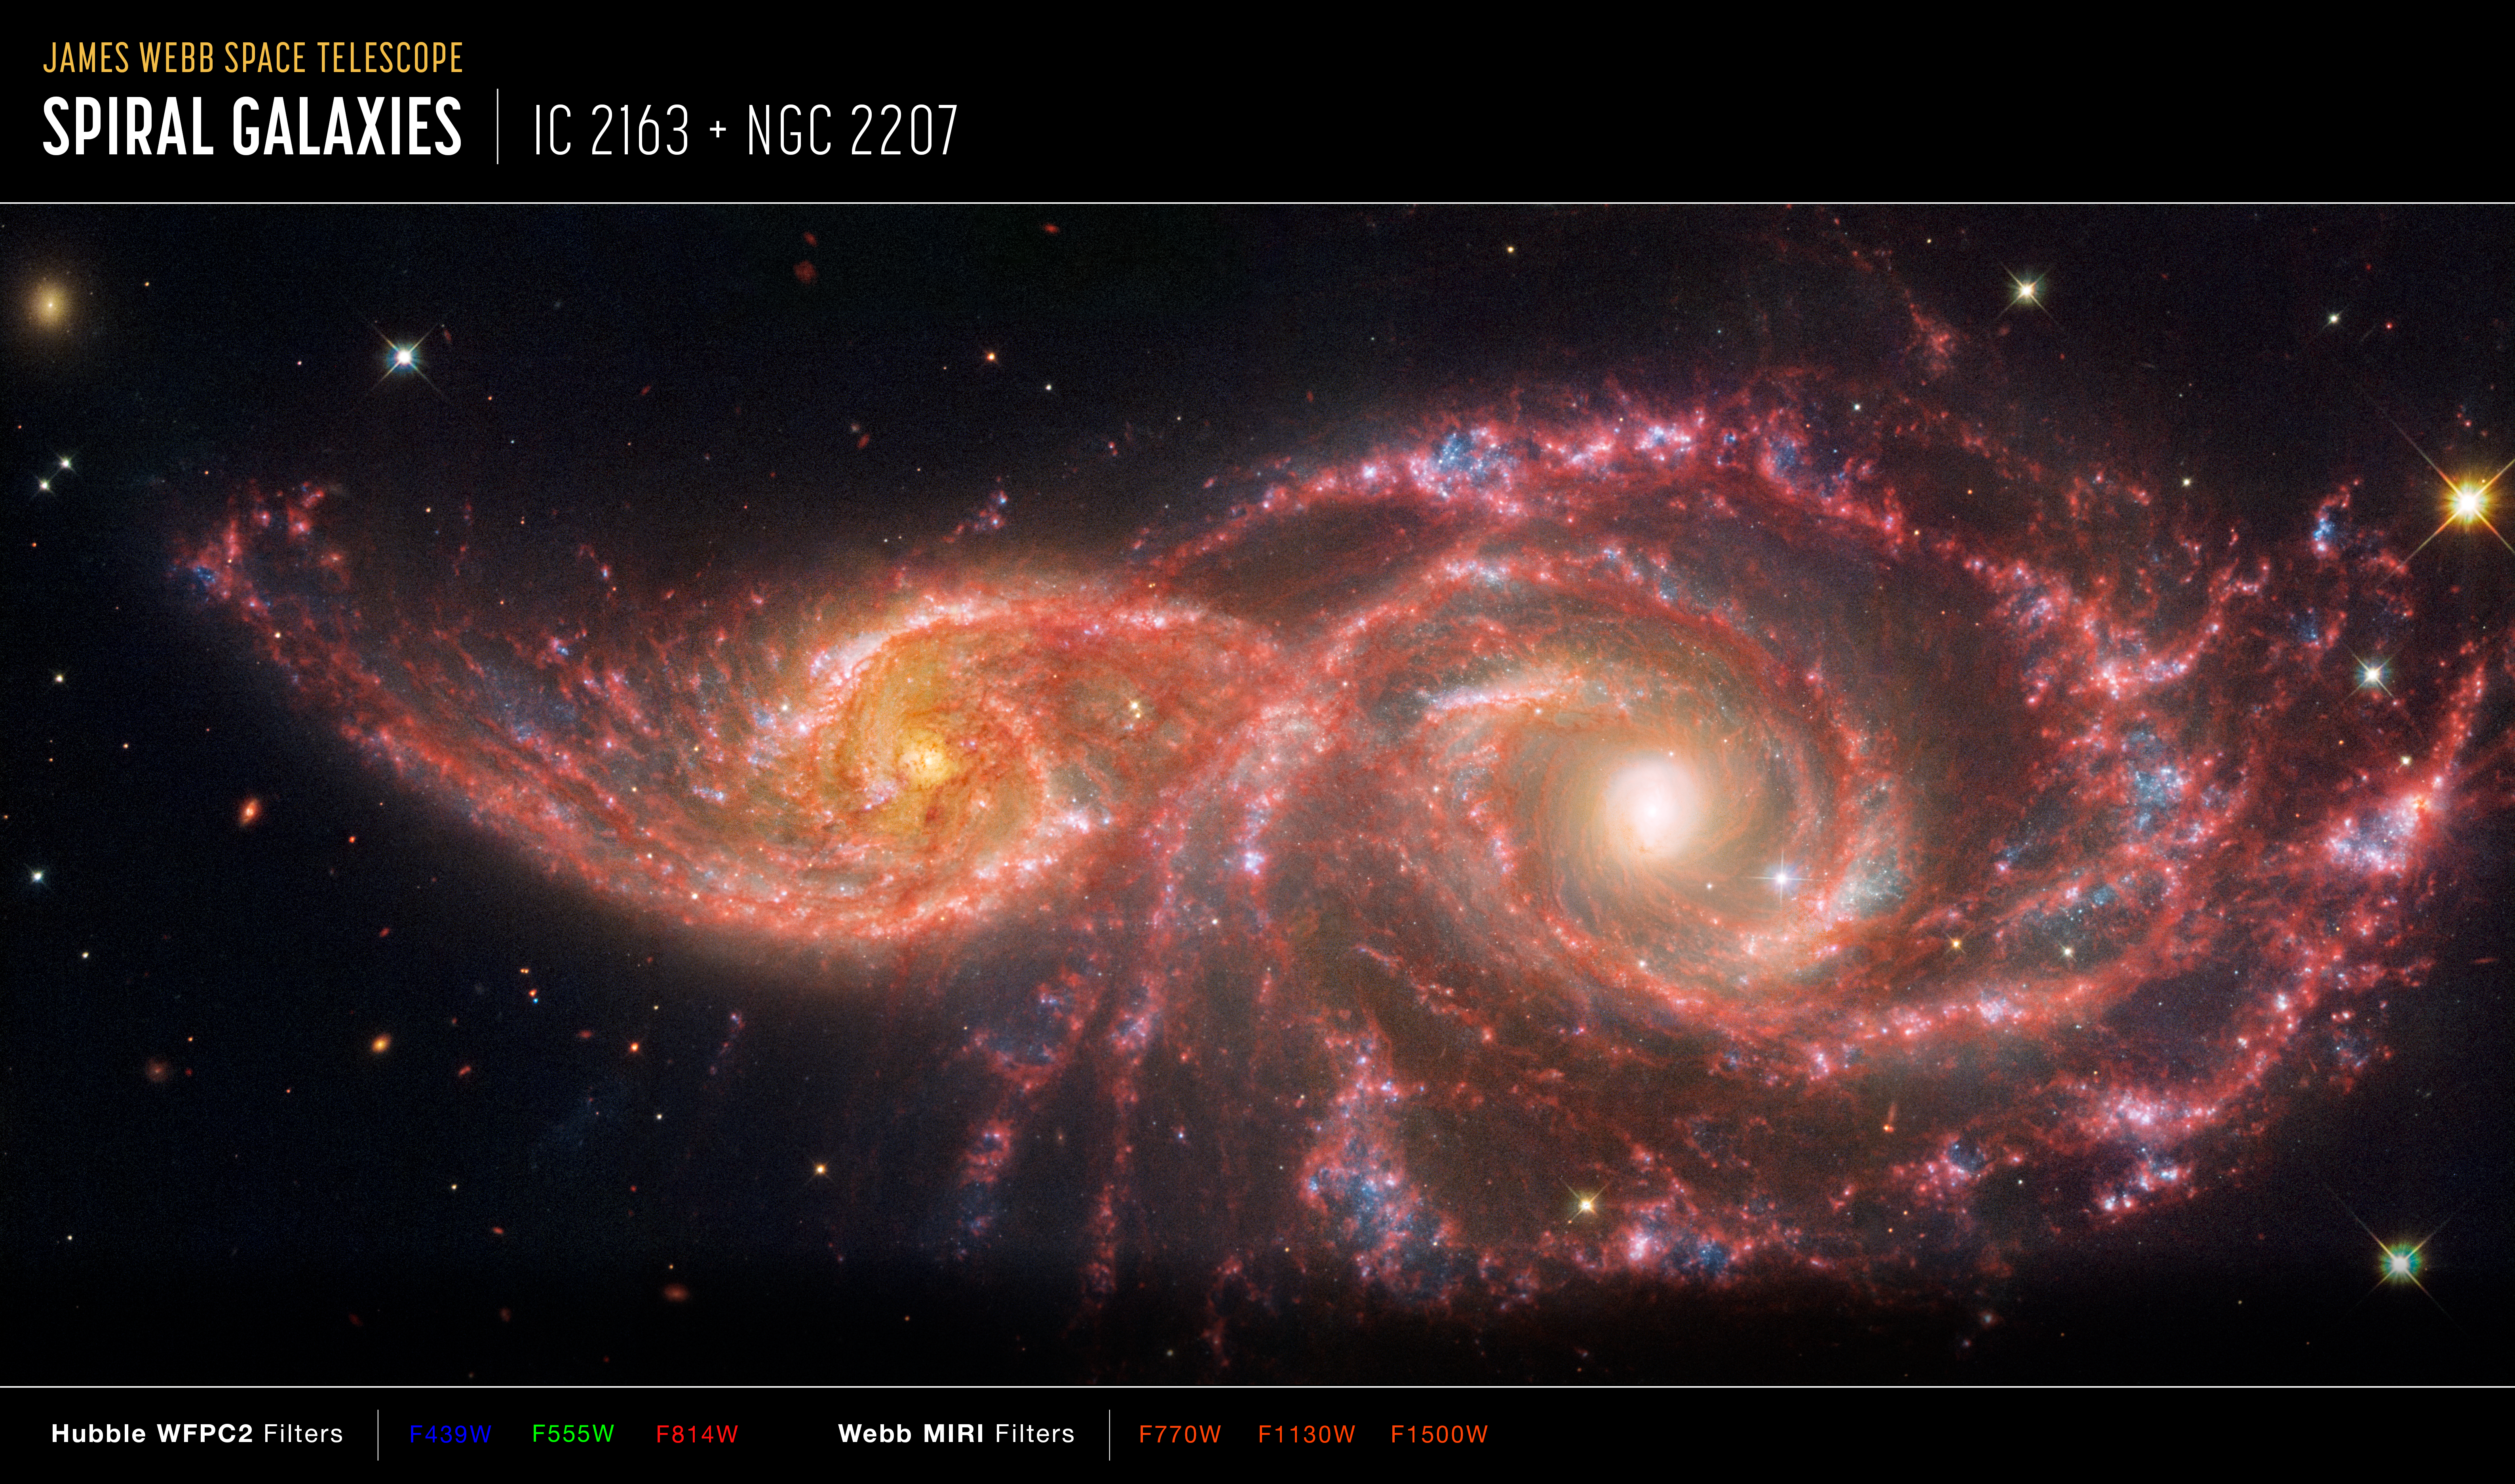

Galaxies IC 2163 and NGC 2207 (Webb and Hubble annotated)

This image of galaxies IC 2163 and NGC 2207, captured by the Hubble and James Webb space telescopes. Hubble’s data are from its Wide Field Planetary Camera 2 (WFPC2). Webb’s data are from its Mid-InfraRed Instrument (MIRI).

The image shows a scale bar, compass arrows, and colour key for reference.

The scale bar is labelled in light-years along the top, which is the distance that light travels in one Earth-year. (It takes three years for light to travel a distance equal to the length of the scale bar.) One light-year is equal to about 9.46 trillion kilometres.

The scale bar is also labelled in arcminutes, which is a measure of angular distance on the sky. One arcsecond is equal to an angular measurement of 1/3600 of one degree. There are 60 arcminutes in a degree and 60 arcseconds in an arcminute. (The full Moon has an angular diameter of about 30 arcminutes.) The actual size of an object that covers one arcsecond on the sky depends on its distance from the telescope.

The north and east compass arrows show the orientation of the image on the sky. Note that the relationship between north and east on the sky (as seen from below) is flipped relative to direction arrows on a map of the ground (as seen from above).

This image shows invisible ultraviolet, visible, and mid-infrared wavelengths of light that have been translated into visible-light colours. The colour key shows which WFPC2 and MIRI filters were used when collecting the light. The colour of each filter name is the visible-light colour used to represent the infrared light that passes through that filter.

Credit: NASA, ESA, CSA, STScI